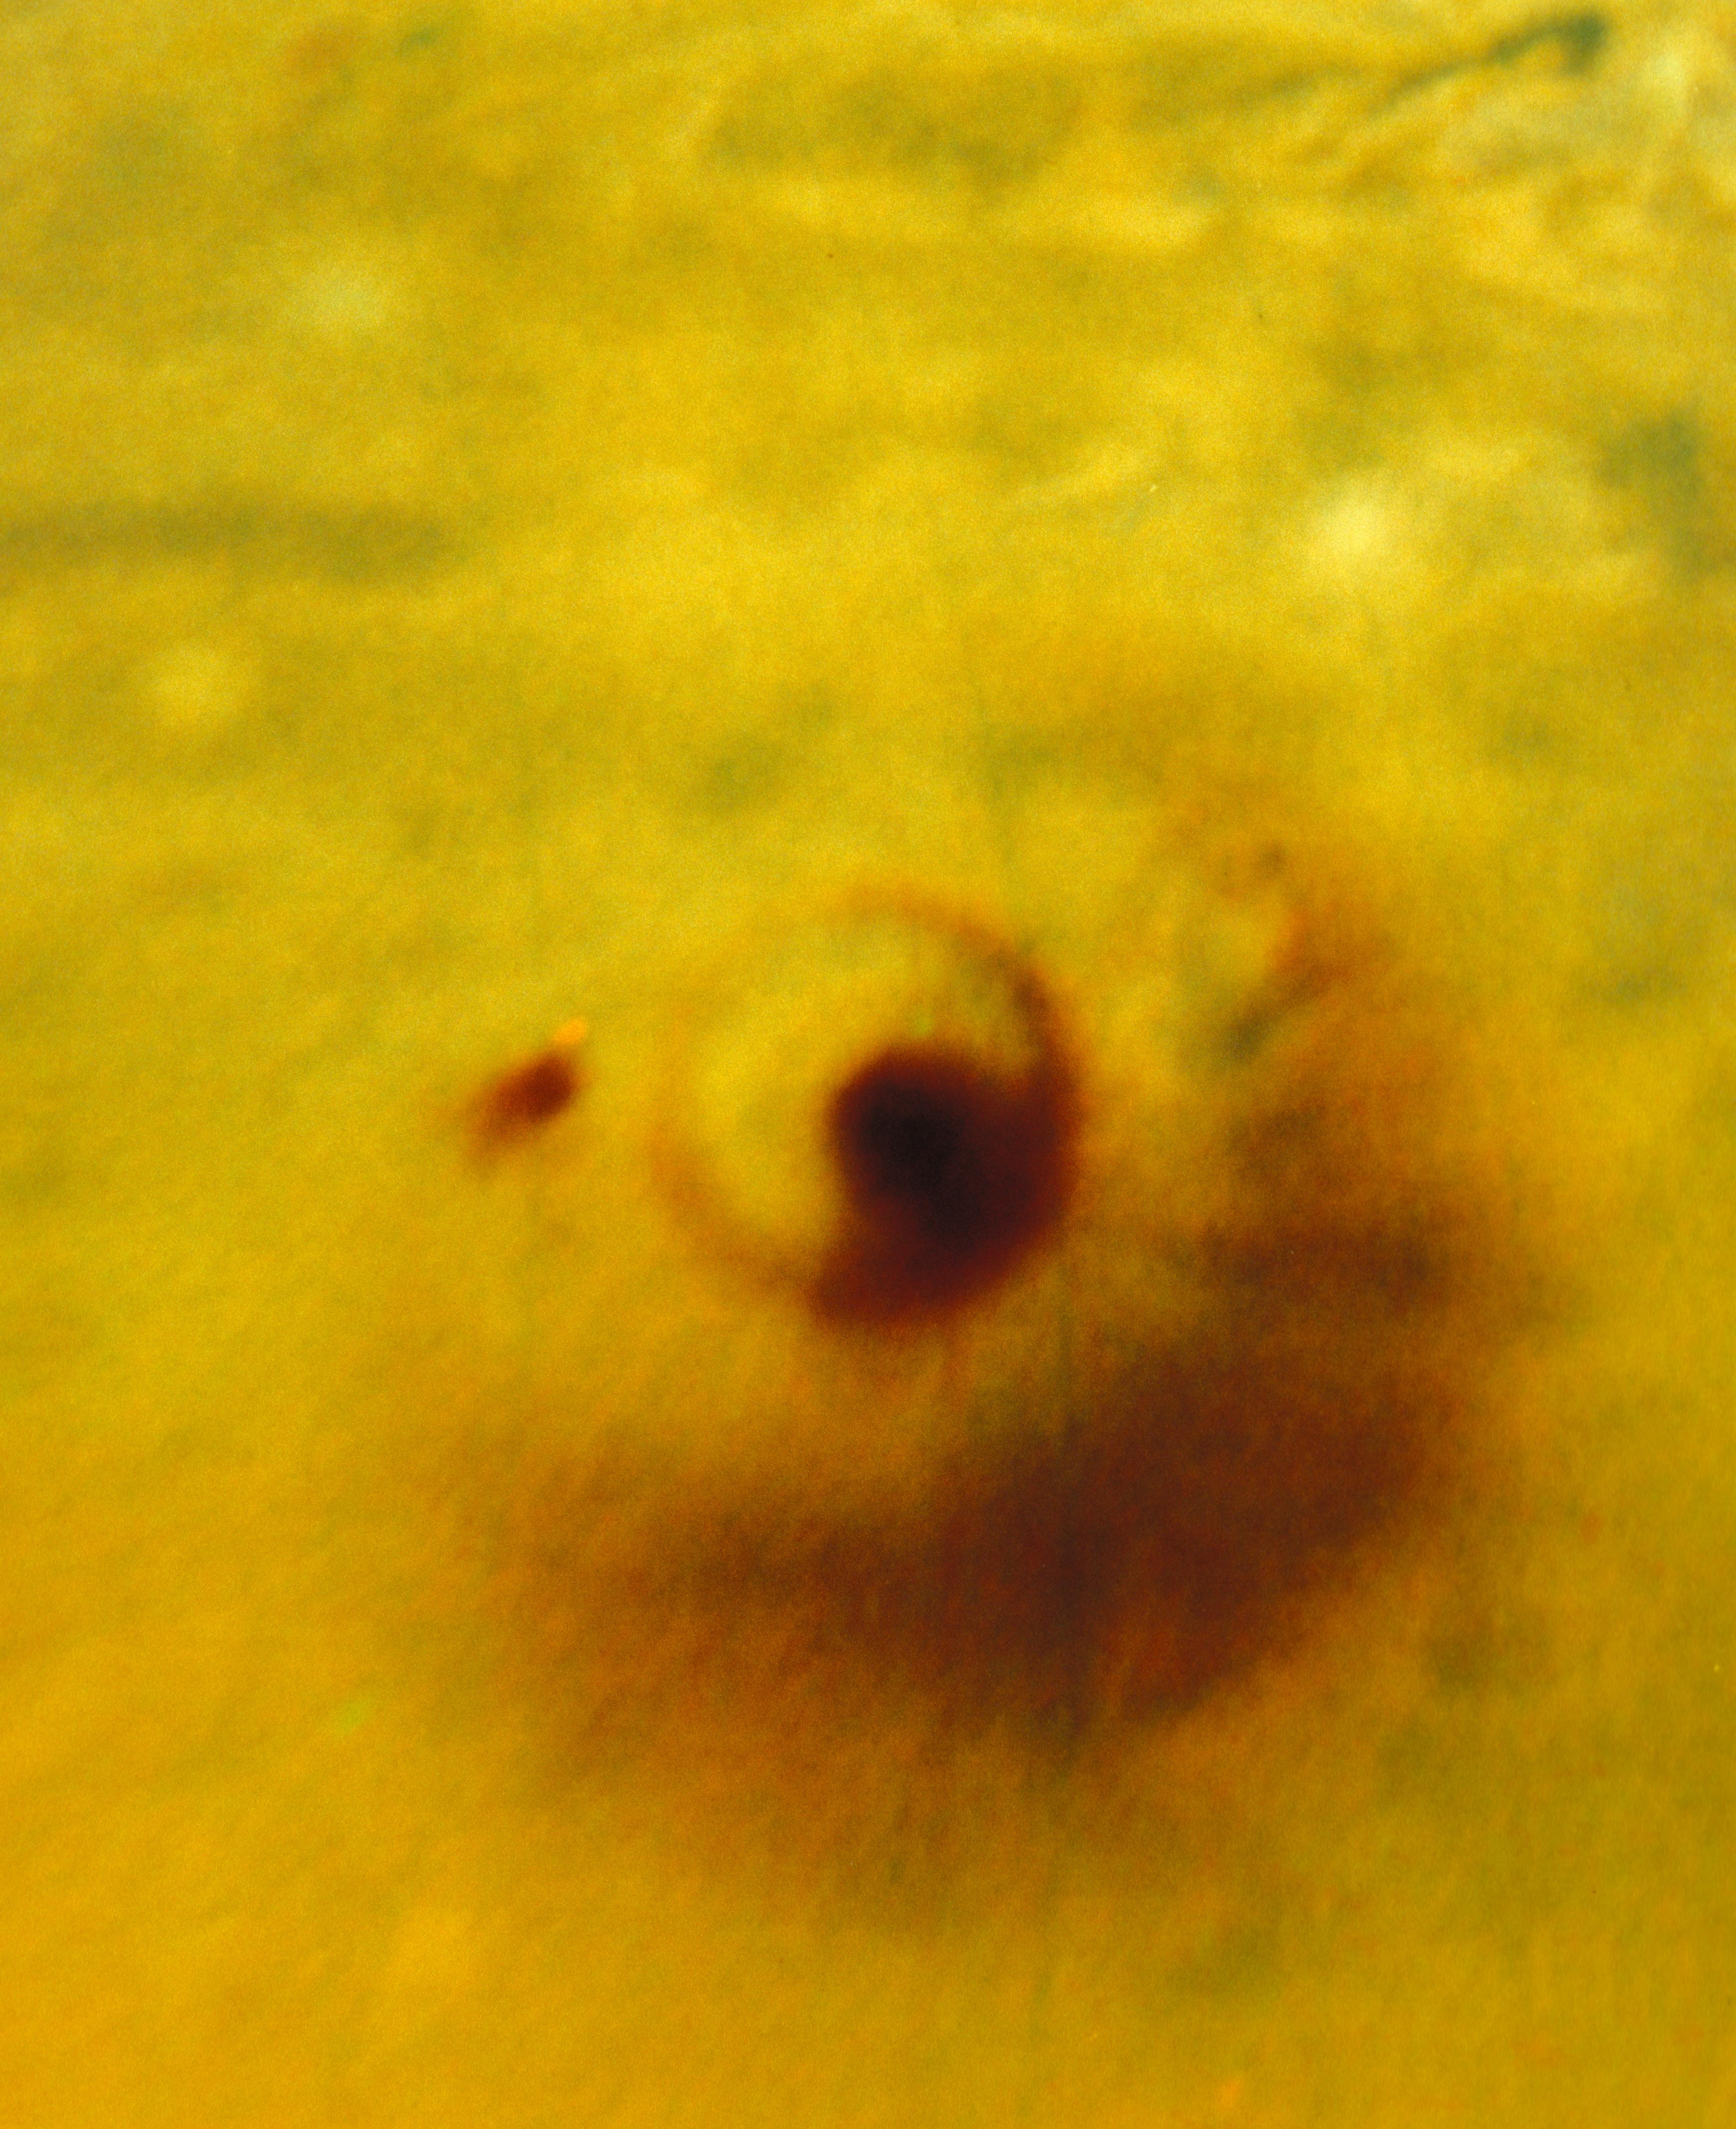

Flat Projection of Large Comet Impact on Jupiter

This is a NASA/ESA Hubble Space Telescope image of the impact sites of fragments "D" and "G" from Comet Shoemaker-Levy 9 which collided with the giant planet Jupiter. The picture has been image processed to correct for the curvature of the disk of Jupiter, so that the spot appears flat, as if the viewer were hovering directly overhead.

The large feature was created by the impact of comet fragment "G" which impacted Jupiter on July 18, 1994. The smaller feature to the left was created on July 17, by the impact of comet fragment "D".

Credit: HST Comet Team and NASA/ESA